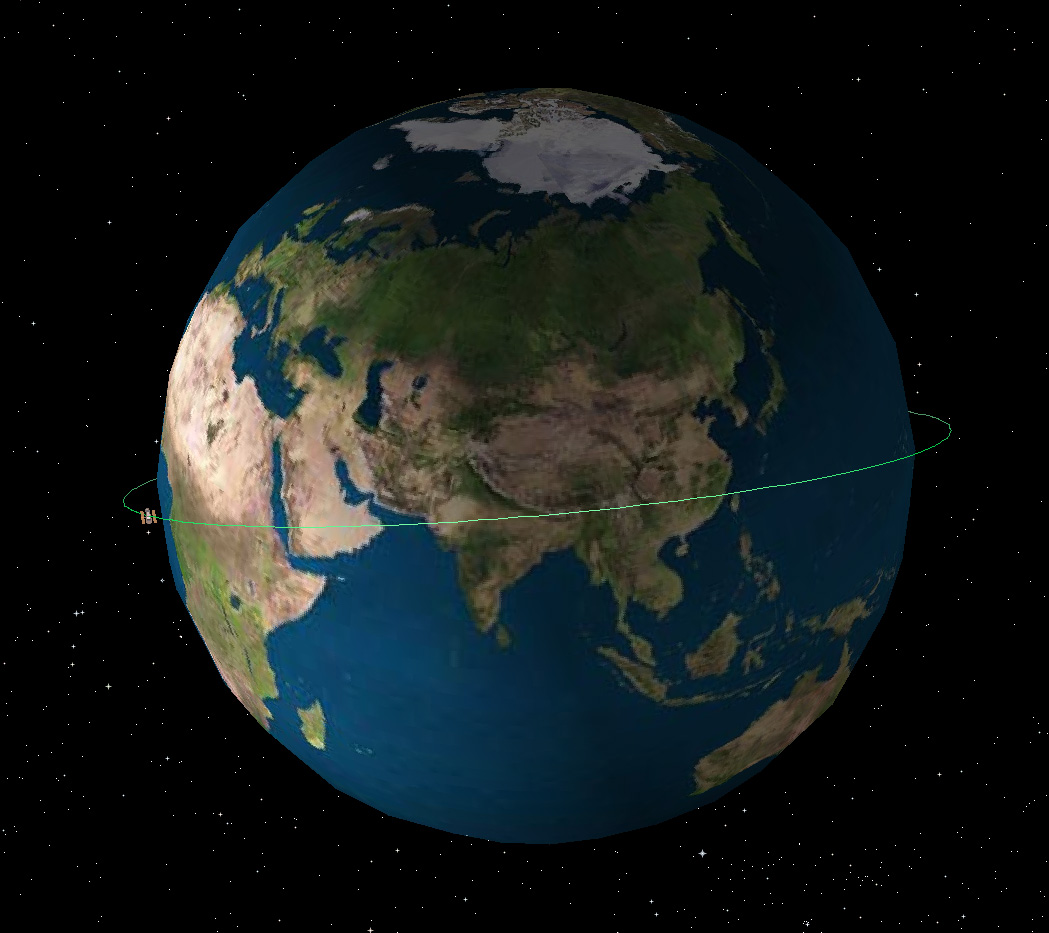

Hubble's orbit

Graphical representation of Hubble's orbit. Hubble lies in a circular Low Earth Orbit at roughly 559 km altitude.

Credit: NASA & ESA